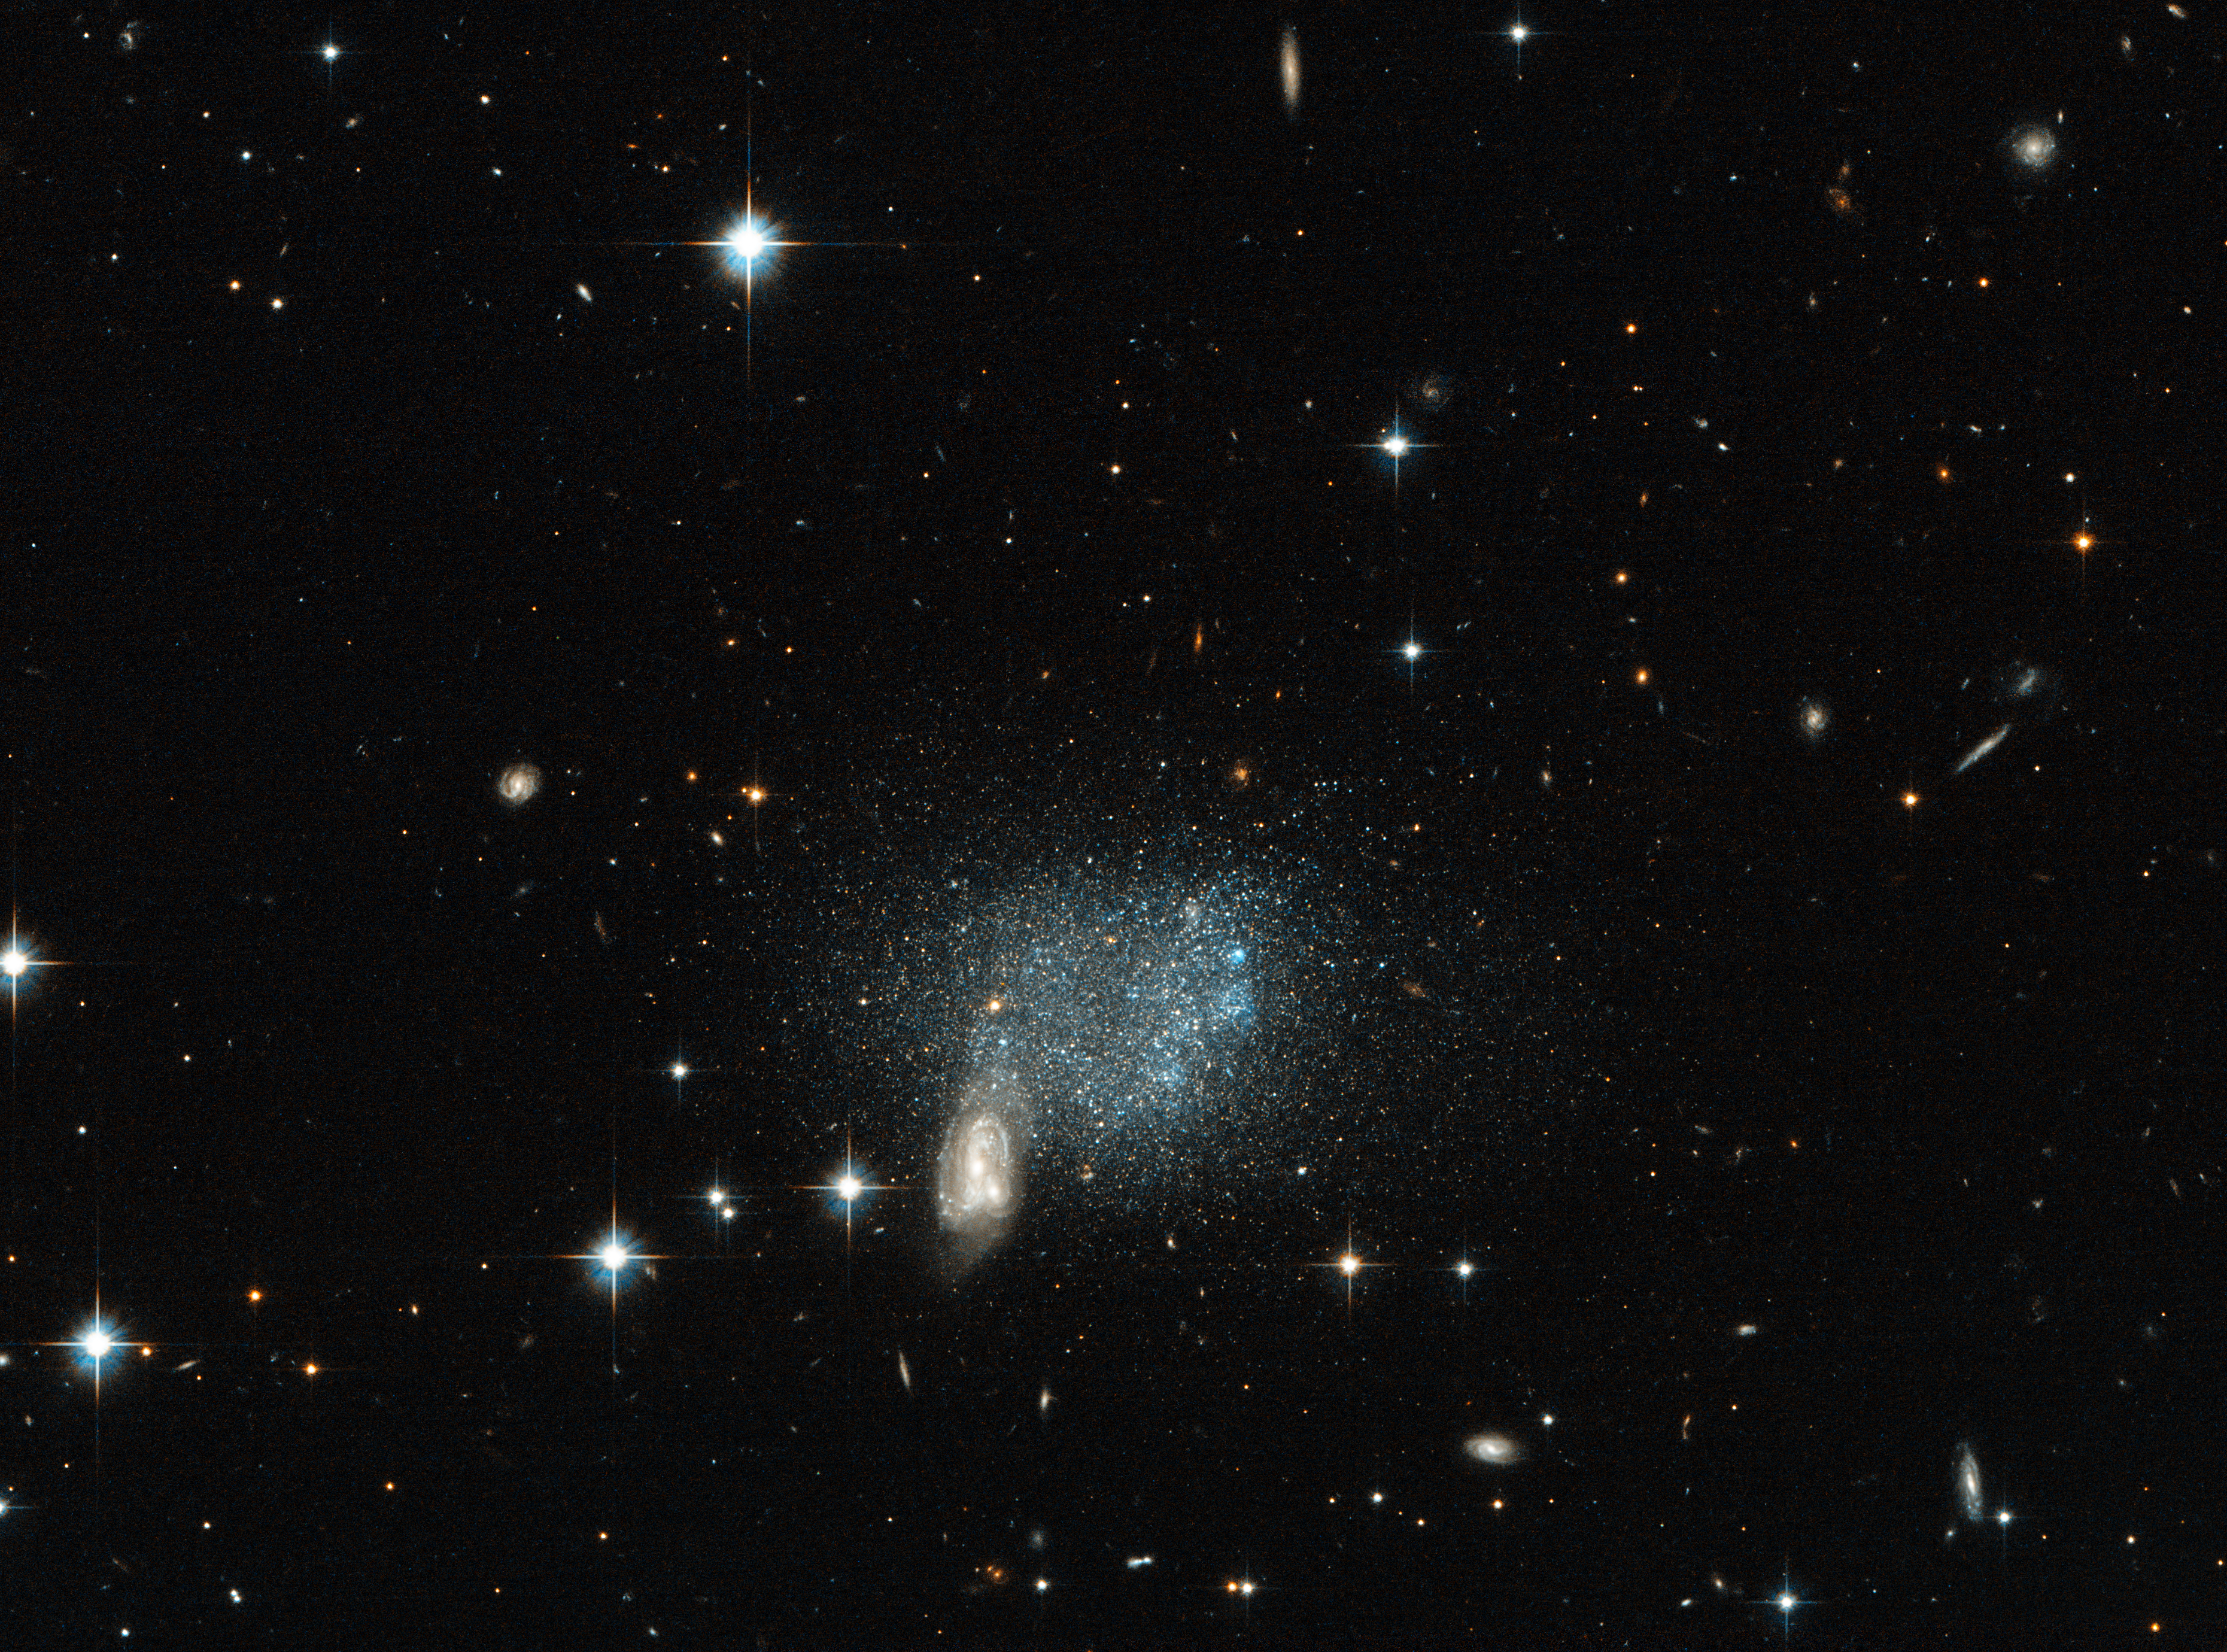

Stars fleeing a cosmic crash

Astronomical pictures sometimes deceive us with tricks of perspective. Right in the centre of this image, two spiral galaxies appear to be suffering a spectacular collision, with a host of stars appearing to flee the scene of the crash in a chaotic stampede.

However, this is just a trick of perspective. It is true that two spiral galaxies are colliding, but they are millions of light-years away, far beyond the cloud of blue and red stars near the merging spiral. This sprinkling of stars is actually an isolated, irregular dwarf galaxy named ESO 489-056. The dwarf galaxy is actually much more distant than many bright stars in the foreground of the image, which are located much closer to us, in the Milky Way.

ESO 489-056 is located 16 million light-years from Earth in the constellation of Canis Major (The Greater Dog), in our local Universe. It is composed of a few billion red and blue stars — a very small number when compared to galaxies like the Milky Way, which is estimated to contain around 200 to 400 billion stars, or the Andromeda Galaxy, which contains a mind-boggling one trillion.

A version of this image was entered into the Hubble's Hidden Treasures image processing competition by contestant Luca Limatola.

Credit: ESA/Hubble & NASA Acknowledgement: Luca Limatola